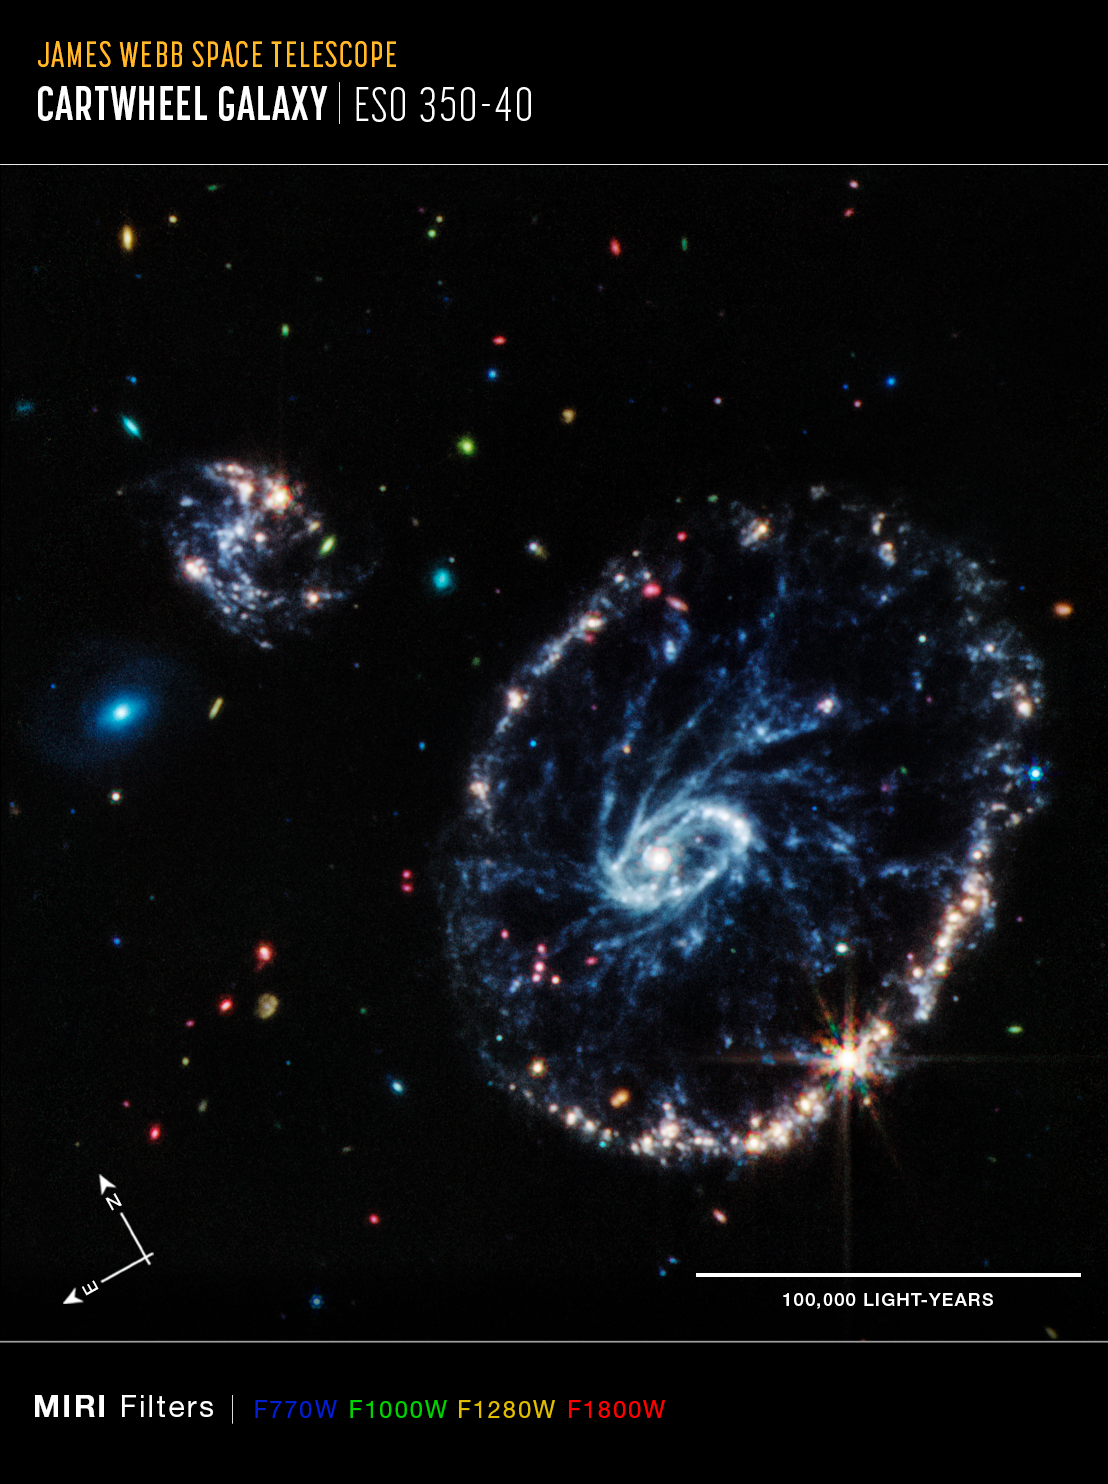

Cartwheel Galaxy (MIRI) - Annotated

This image from Webb’s Mid-Infrared Instrument (MIRI) shows a group of galaxies, including a large distorted ring-shaped galaxy known as the Cartwheel. The Cartwheel Galaxy, located 500 million light-years away in the Sculptor constellation, is composed of a bright inner ring and an active outer ring. While this outer ring has a lot of star formation, the dusty area in between reveals many stars and star clusters.

The mid-infrared light captured by MIRI reveals fine details about these dusty regions and young stars within the Cartwheel Galaxy, which are rich in hydrocarbons and other chemical compounds, as well as silicate dust, like much of the dust on Earth.

Young stars, many of which are present in the bottom right of the outer ring, energise surrounding hydrocarbon dust, causing it to glow orange. On the other hand, the clearly defined dust between the core and the outer ring, which forms the “spokes” that inspire the galaxy’s name, is mostly silicate dust.

The smaller spiral galaxy to the upper left of Cartwheel displays much of the same behaviour, showing a large amount of star formation.

MIRI was contributed by ESA and NASA, with the instrument designed and built by a consortium of nationally funded European Institutes (the MIRI European Consortium) in partnership with JPL and the University of Arizona.

Credit: NASA, ESA, CSA, STScI